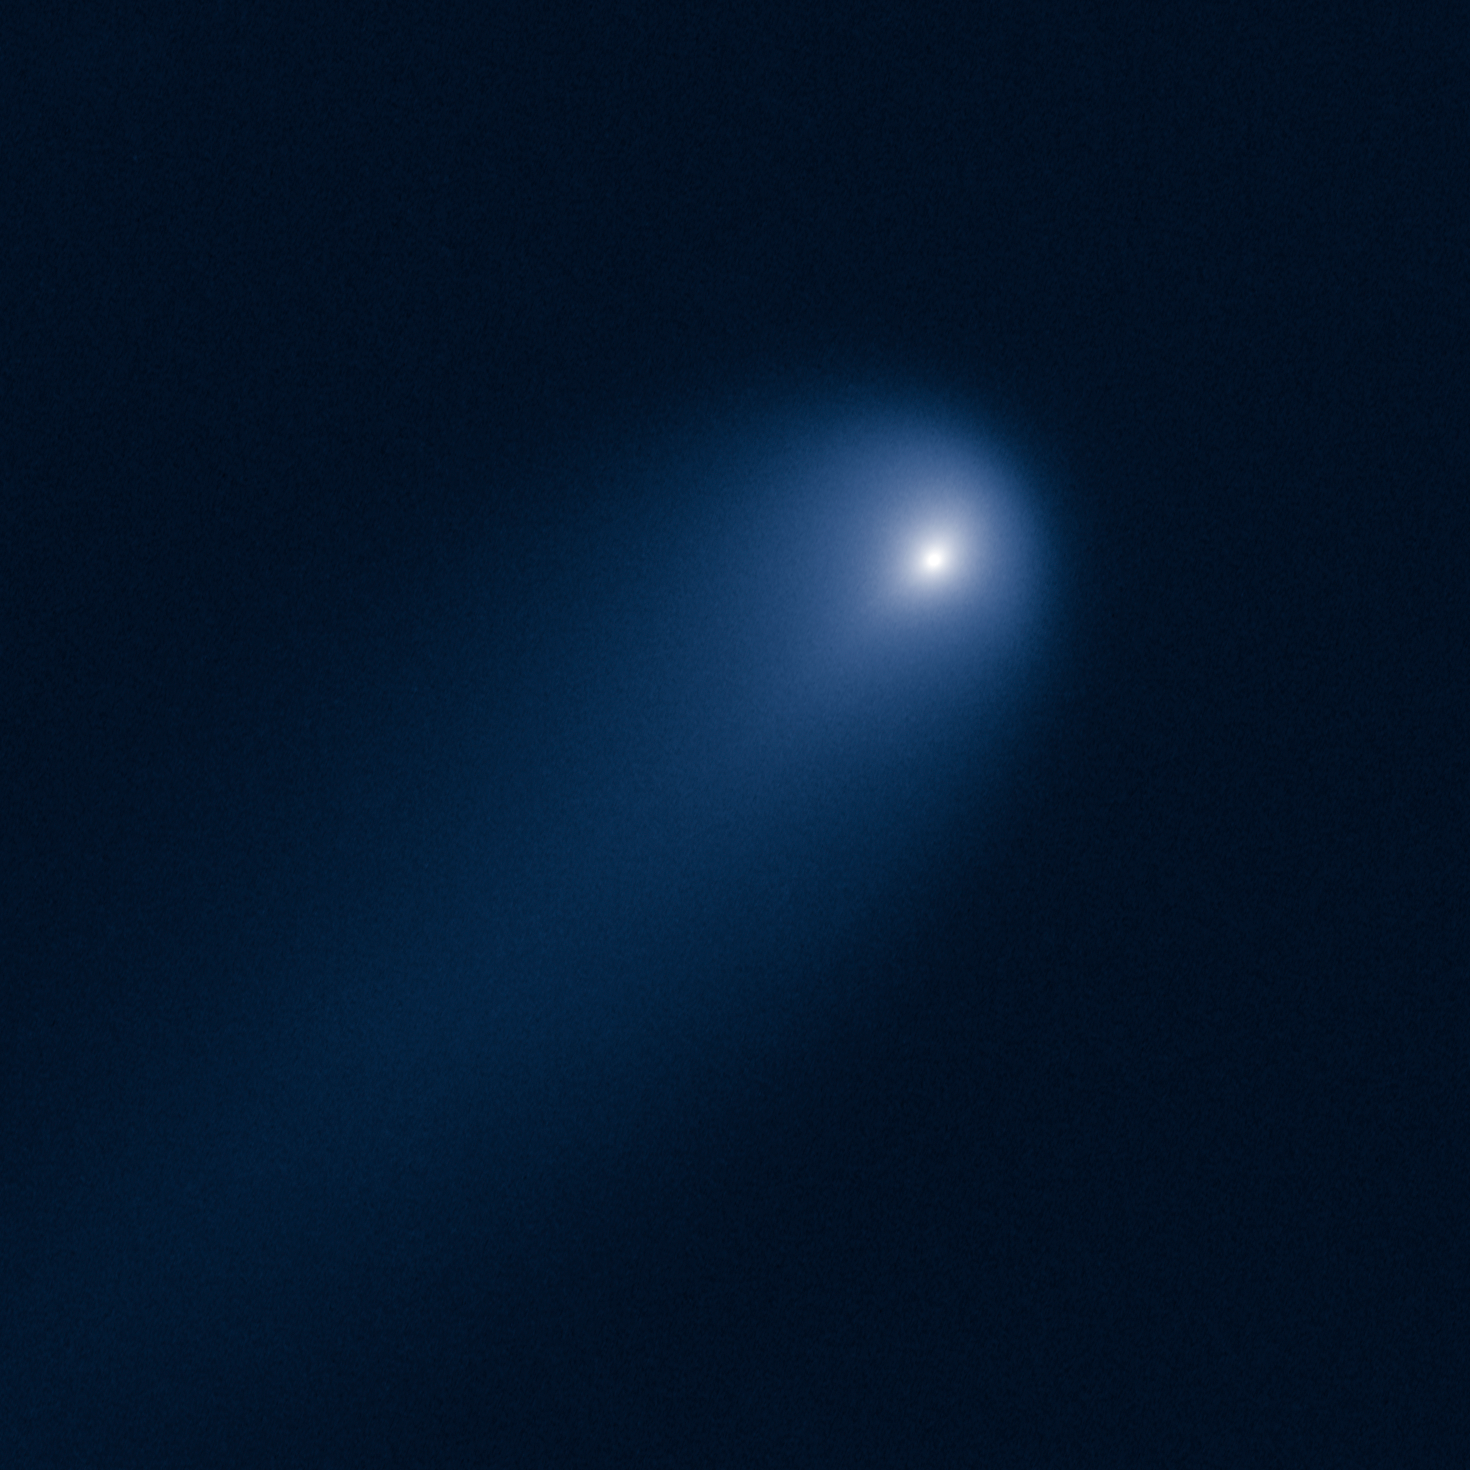

Hubble captures Comet ISON

This NASA/ESA Hubble Space Telescope image of Comet (C/2012 S1) ISON was photographed on 10 April, when the comet was just within Jupiter’s orbit, at a distance of 386 million miles from the Sun (394 million miles from Earth).

Even at that great distance the comet is already active as sunlight warms the surface and causes frozen volatiles to sublimate. Preliminary measurements from the Hubble images suggest that the nucleus of ISON is no larger than three or four miles across – remarkably small considering the high level of activity that researchers have observed in the comet so far. Astronomers are using these images to measure the activity level of this comet and constrain the size of the nucleus, in order to predict the comet’s activity when it skims 700 000 miles above the sun’s roiling surface on 28 November 2013.

The comet’s dusty coma is approximately 3 100 miles across, or 1.2 times the width of Australia. A dust tail extends more than 57 000 miles, far beyond Hubble’s field of view.

ISON stands for International Scientific Optical Network, a group of observatories in ten countries who have organised to detect, monitor, and track objects in space. ISON is managed by the Keldysh Institute of Applied Mathematics, part of the Russian Academy of Sciences.

Credit: NASA, ESA, J.-Y. Li (Planetary Science Institute), and the Hubble Comet ISON Imaging Science Team